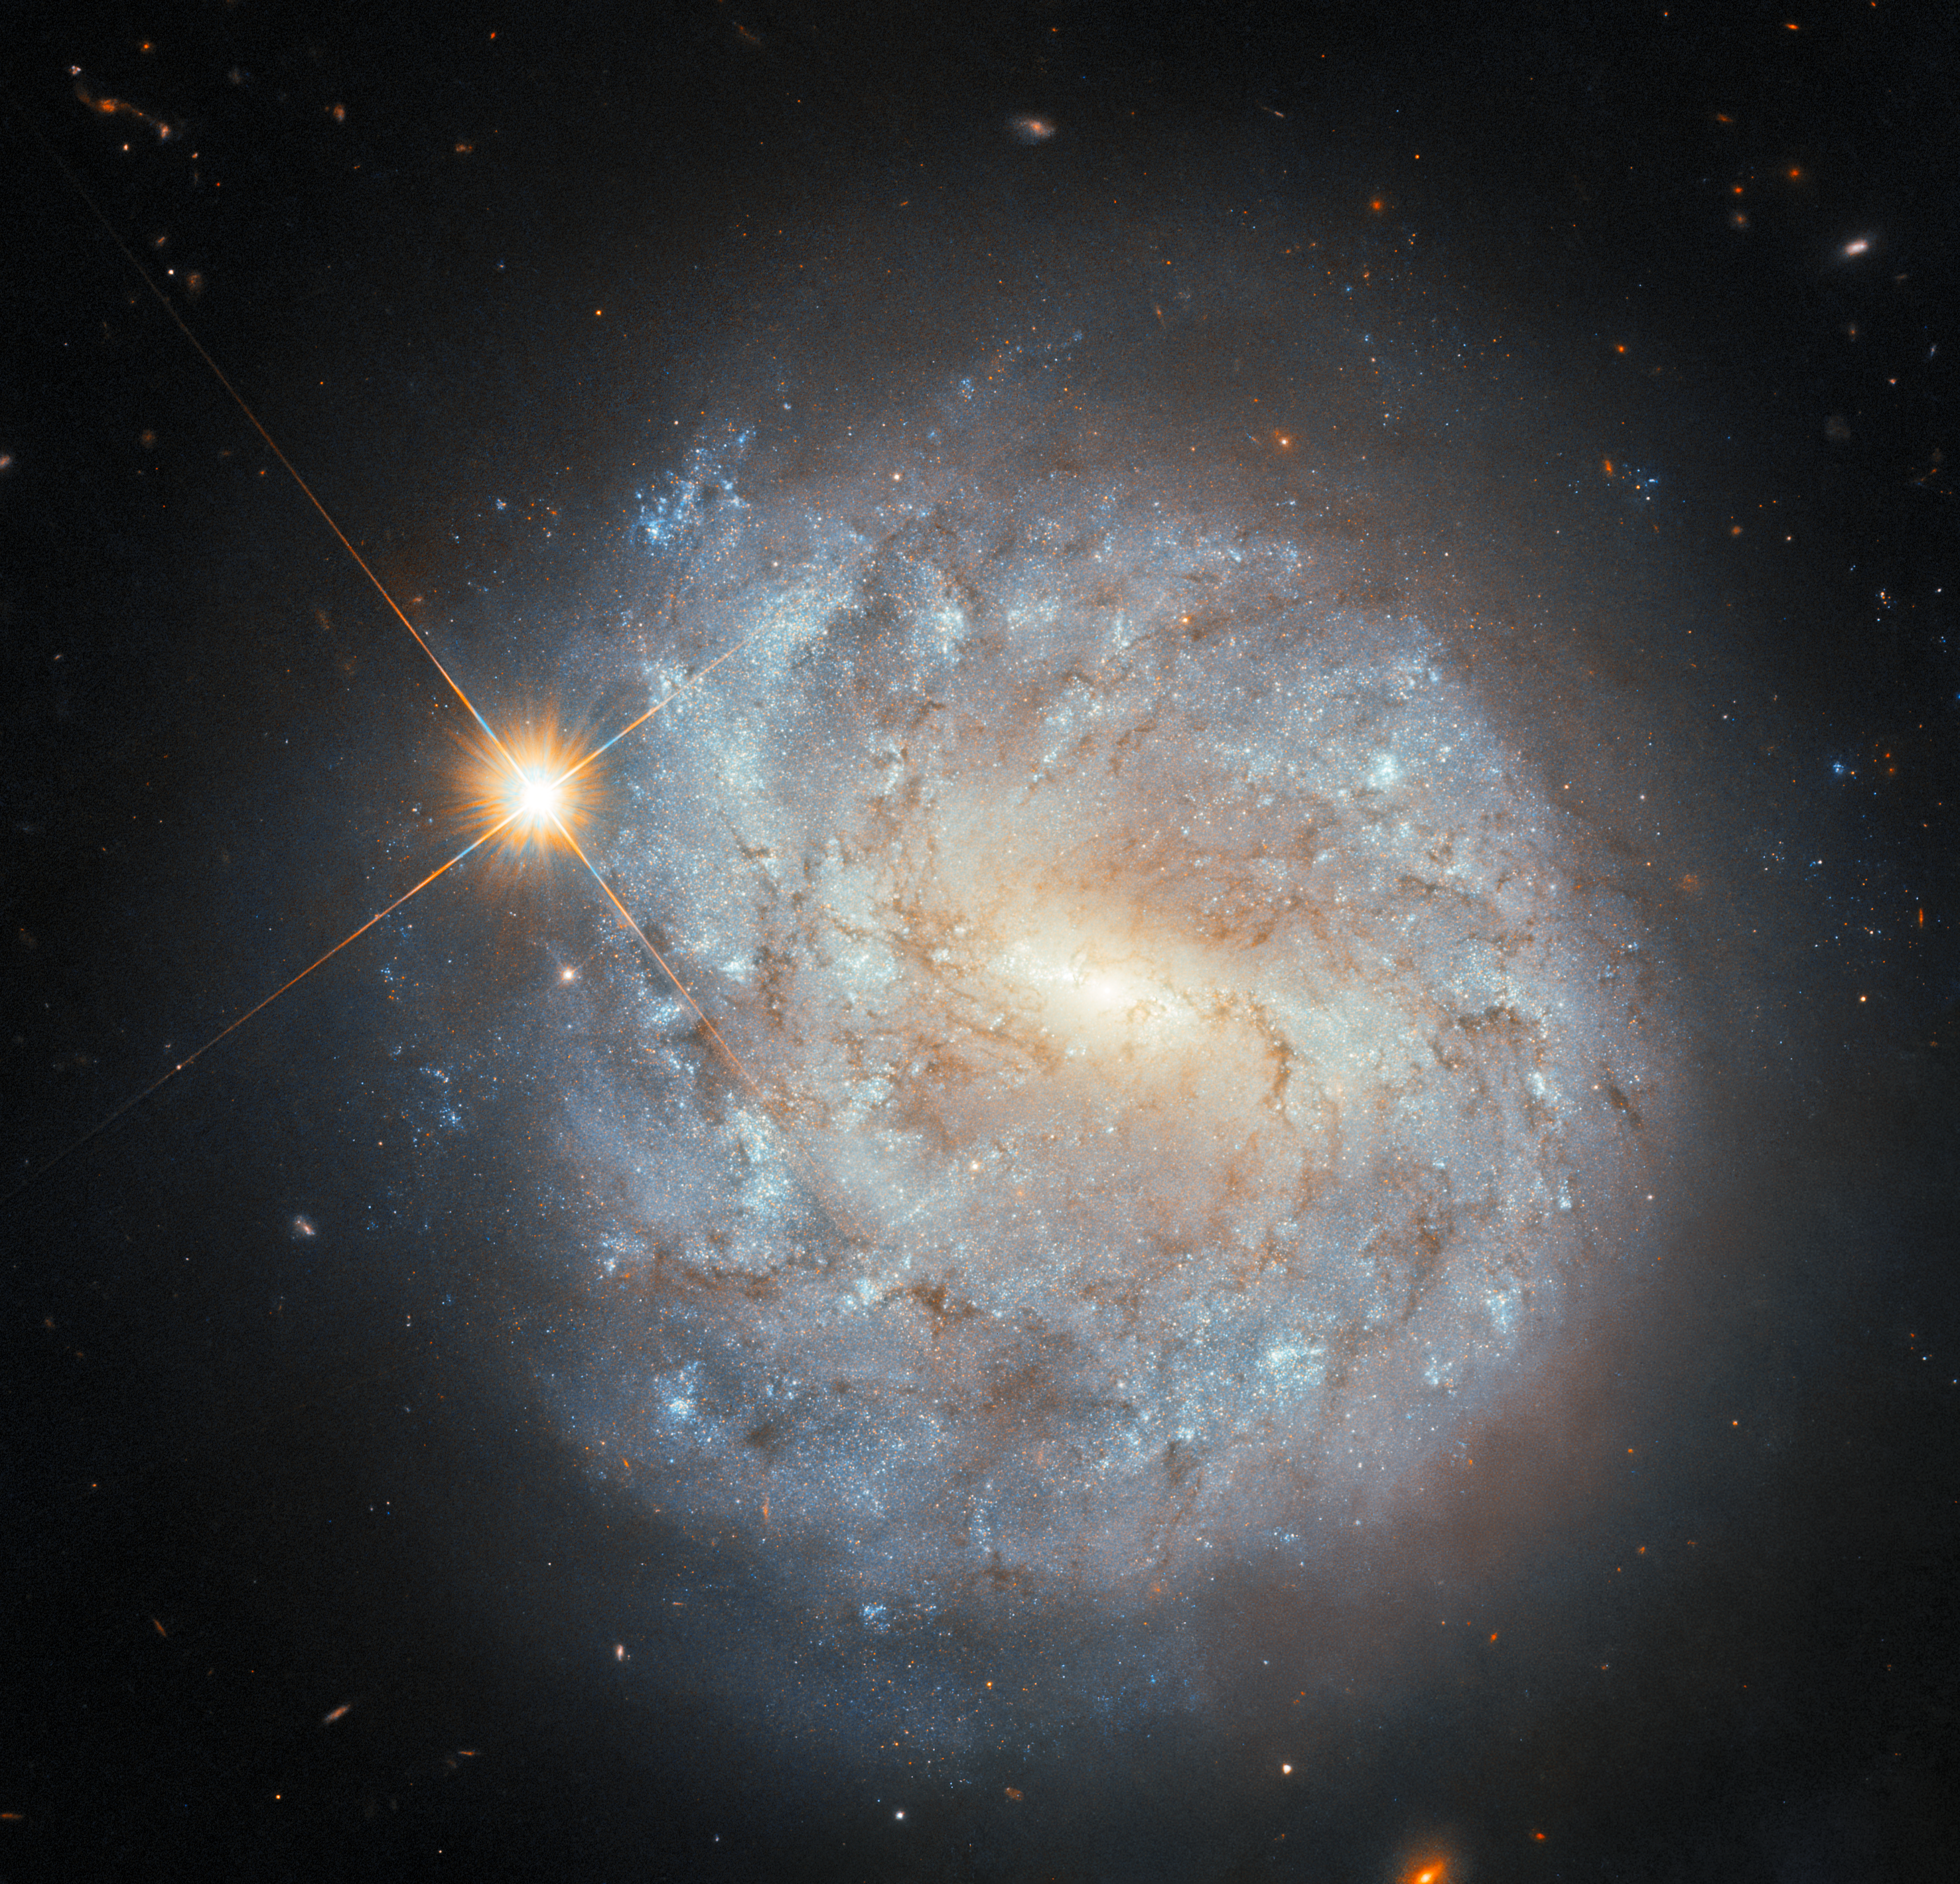

A spiral and a star

This NASA/ESA Hubble Space Telescope Picture of the Week features a sparkling spiral galaxy paired with a prominent star, both in the constellation Virgo. While the galaxy and the star appear to be close to one another, even overlapping, they’re actually a great distance apart. The star, which is marked with four long diffraction spikes, is in our own galaxy. It’s just 7109 light-years away from Earth. The galaxy, which is named NGC 4900, lies about 45 million light-years from Earth.

This image combines data from two of Hubble’s instruments: the Advanced Camera for Surveys, which was installed in 2002 and is still in operation today, and the older Wide Field and Planetary Camera 2, which was in use from 1993 to 2009. The data used here were taken more than 20 years apart for two different observing programmes — a real testament to Hubble’s long scientific lifetime!

Both programmes aimed to understand the demise of massive stars. In one, researchers studied the sites of past supernovae, aiming to estimate the masses of the stars that exploded and investigate how supernovae interact with their surroundings. NGC 4900 was selected for study because it hosted a supernova named SN 1999br.

In the other programme, researchers laid the groundwork for studying future supernovae by collecting images of more than 150 nearby galaxies. After a supernova is detected in one of these galaxies, researchers can examine these images, searching for a star at the location of the supernova. Identifying a supernova progenitor star in pre-explosion images gives valuable information about how, when and why supernovae occur.

Credit: ESA/Hubble & NASA, S. J. Smartt, C. Kilpatrick